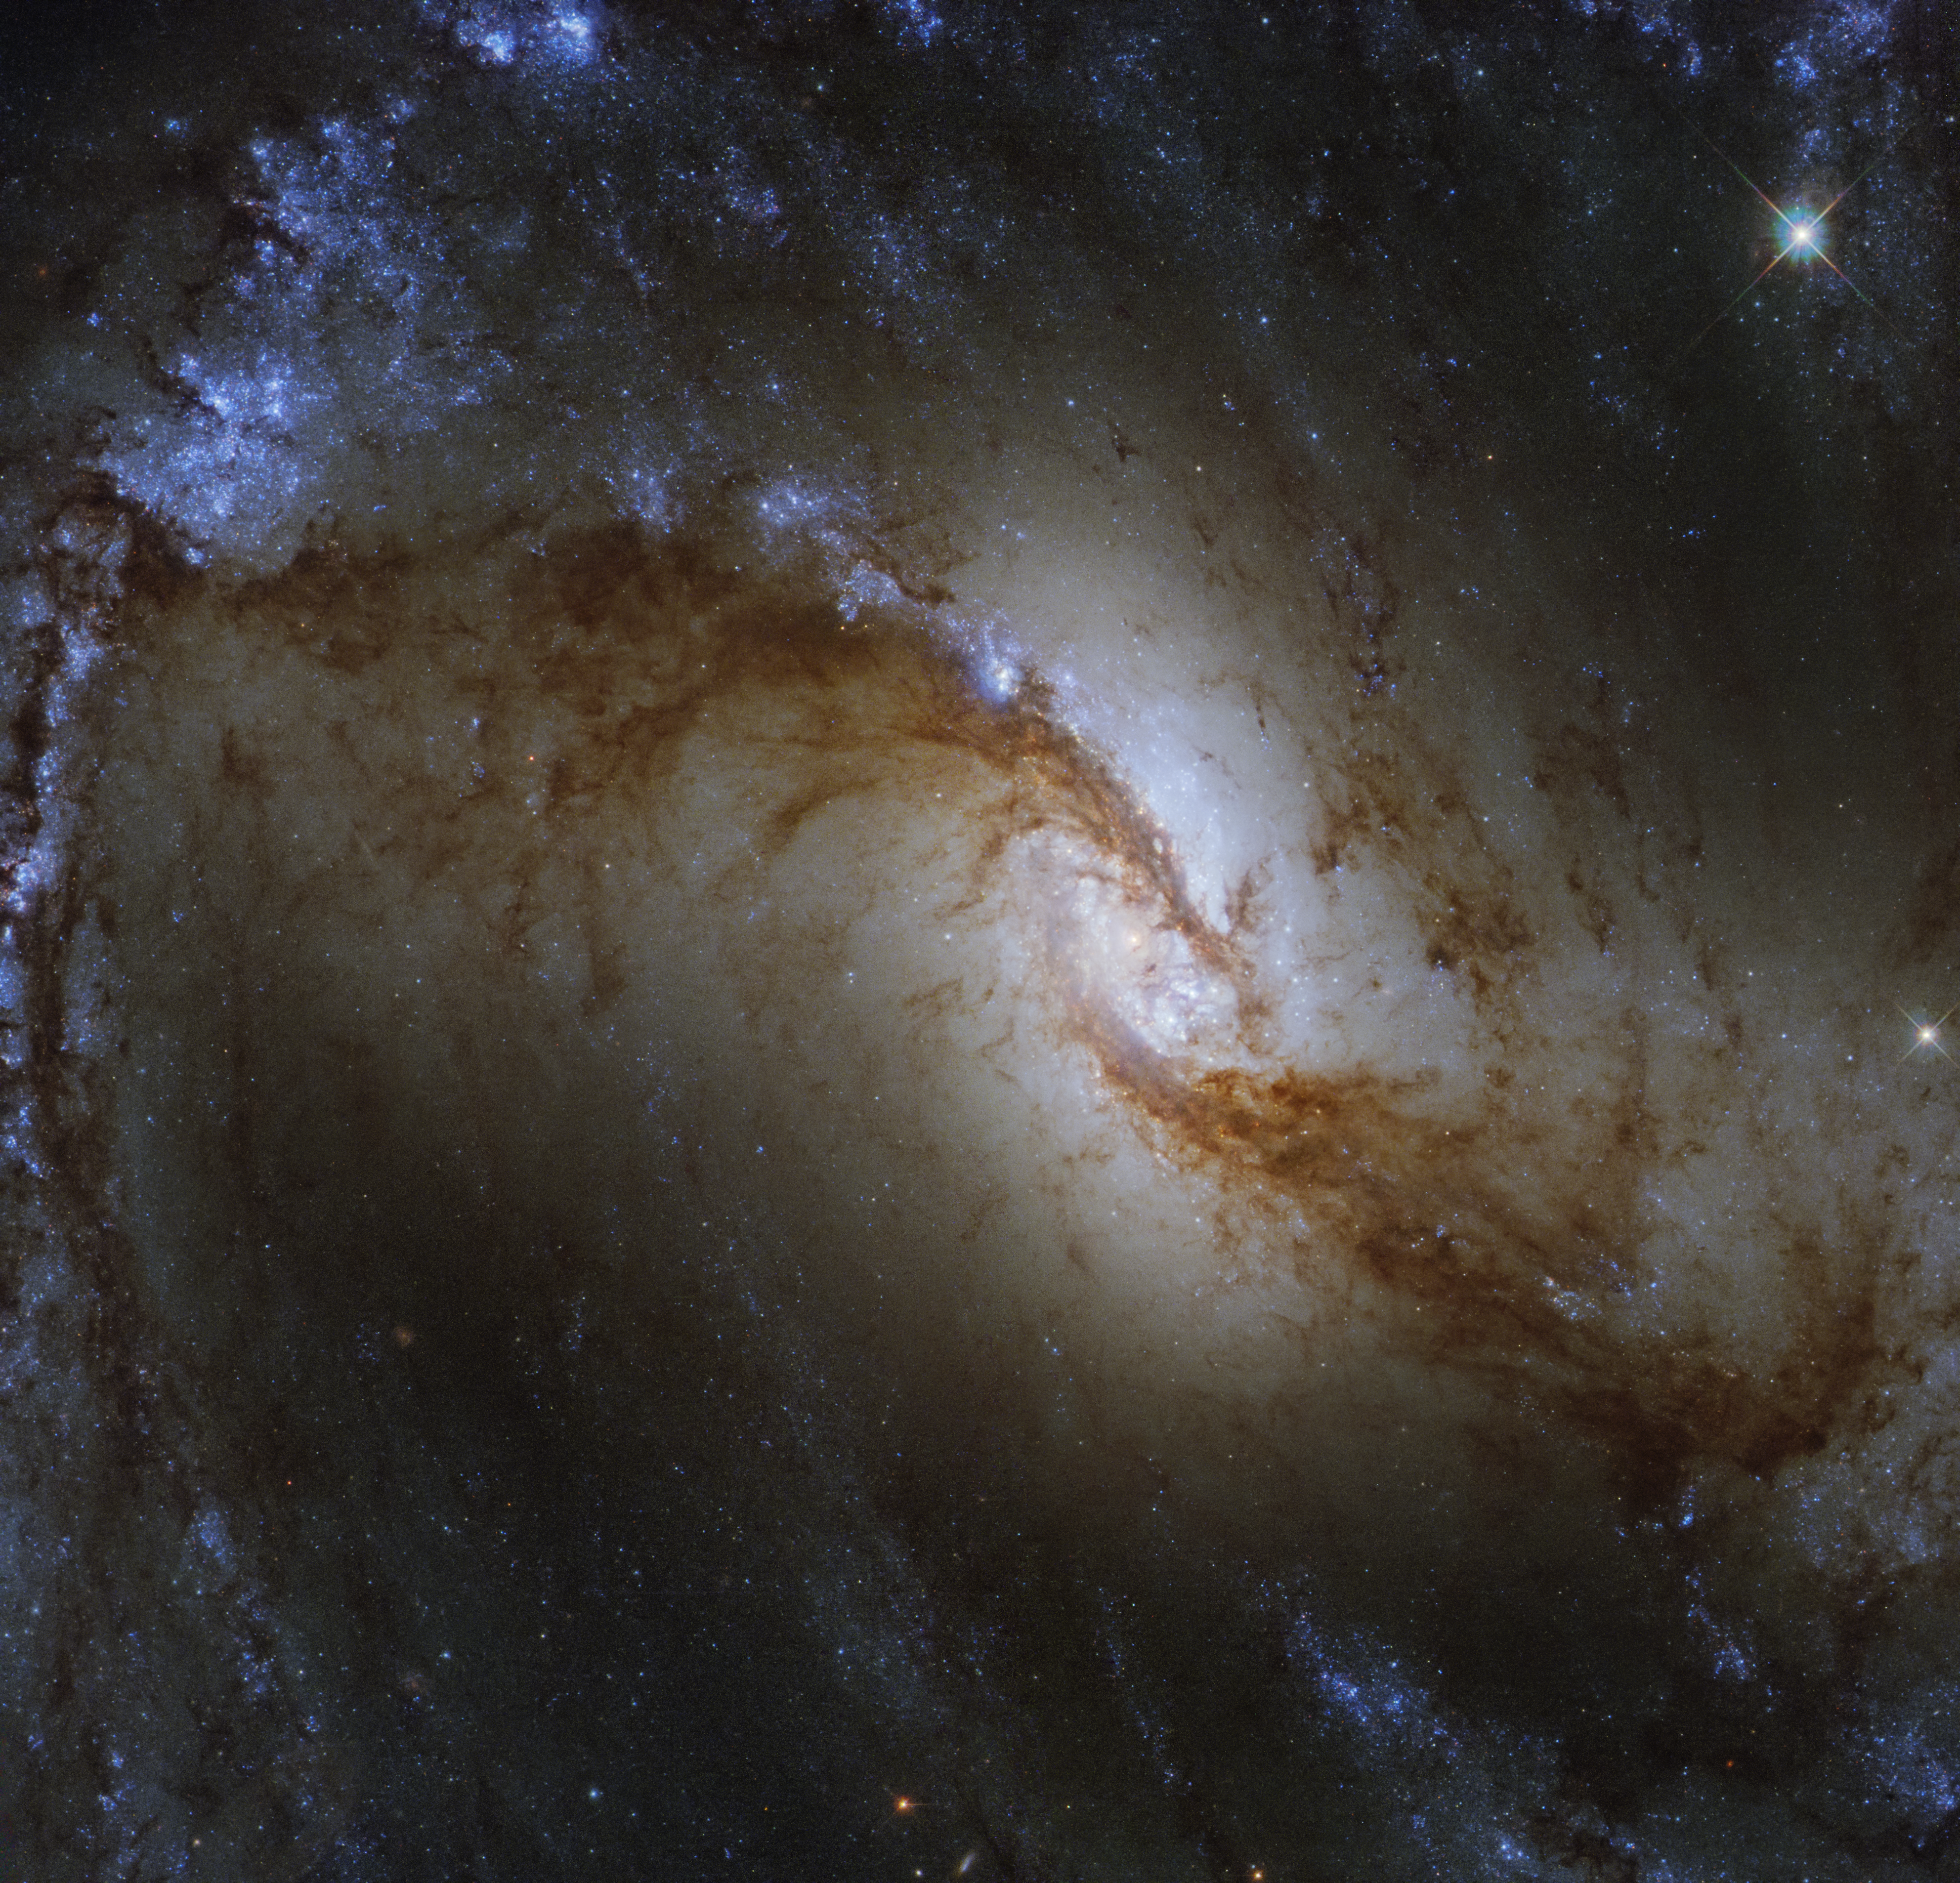

Survey of the Stars

At around 60 million light-years from Earth, the Great Barred Spiral Galaxy NGC 1365 is captured beautifully in this image by the NASA/ESA Hubble Space Telescope. Located in the constellation of Fornax (The Furnace), the blue and fiery orange swirls show us where stars have just formed and the dusty sites of future stellar nurseries.

At the outer edge of the image, enormous star-forming regions within NGC 1365 can be seen. The bright, light-blue regions indicate the presence of hundreds of baby stars that formed from coalescing gas and dust within the galaxy's outer arms.

This Hubble image was captured as part of a joint survey with the Atacama Large Millimeter/submillimeter Array (ALMA) in Chile. The survey will help scientists understand how the diversity of galaxy environments observed in the nearby Universe, including NGC 1365 and previous ESA/Hubble Pictures of the Week such as NGC 2835 and NGC 2775, influence the formation of stars and star clusters. Expected to image over 100 000 gas clouds and star-forming regions beyond our Milky Way, the PHANGS survey is expected to uncover and clarify many of the links between cold gas clouds, star formation and the overall shape and morphology of galaxies.

Credit: ESA/Hubble & NASA, J. Lee and the PHANGS-HST Team Acknowledgement: Judy Schmidt (Geckzilla)